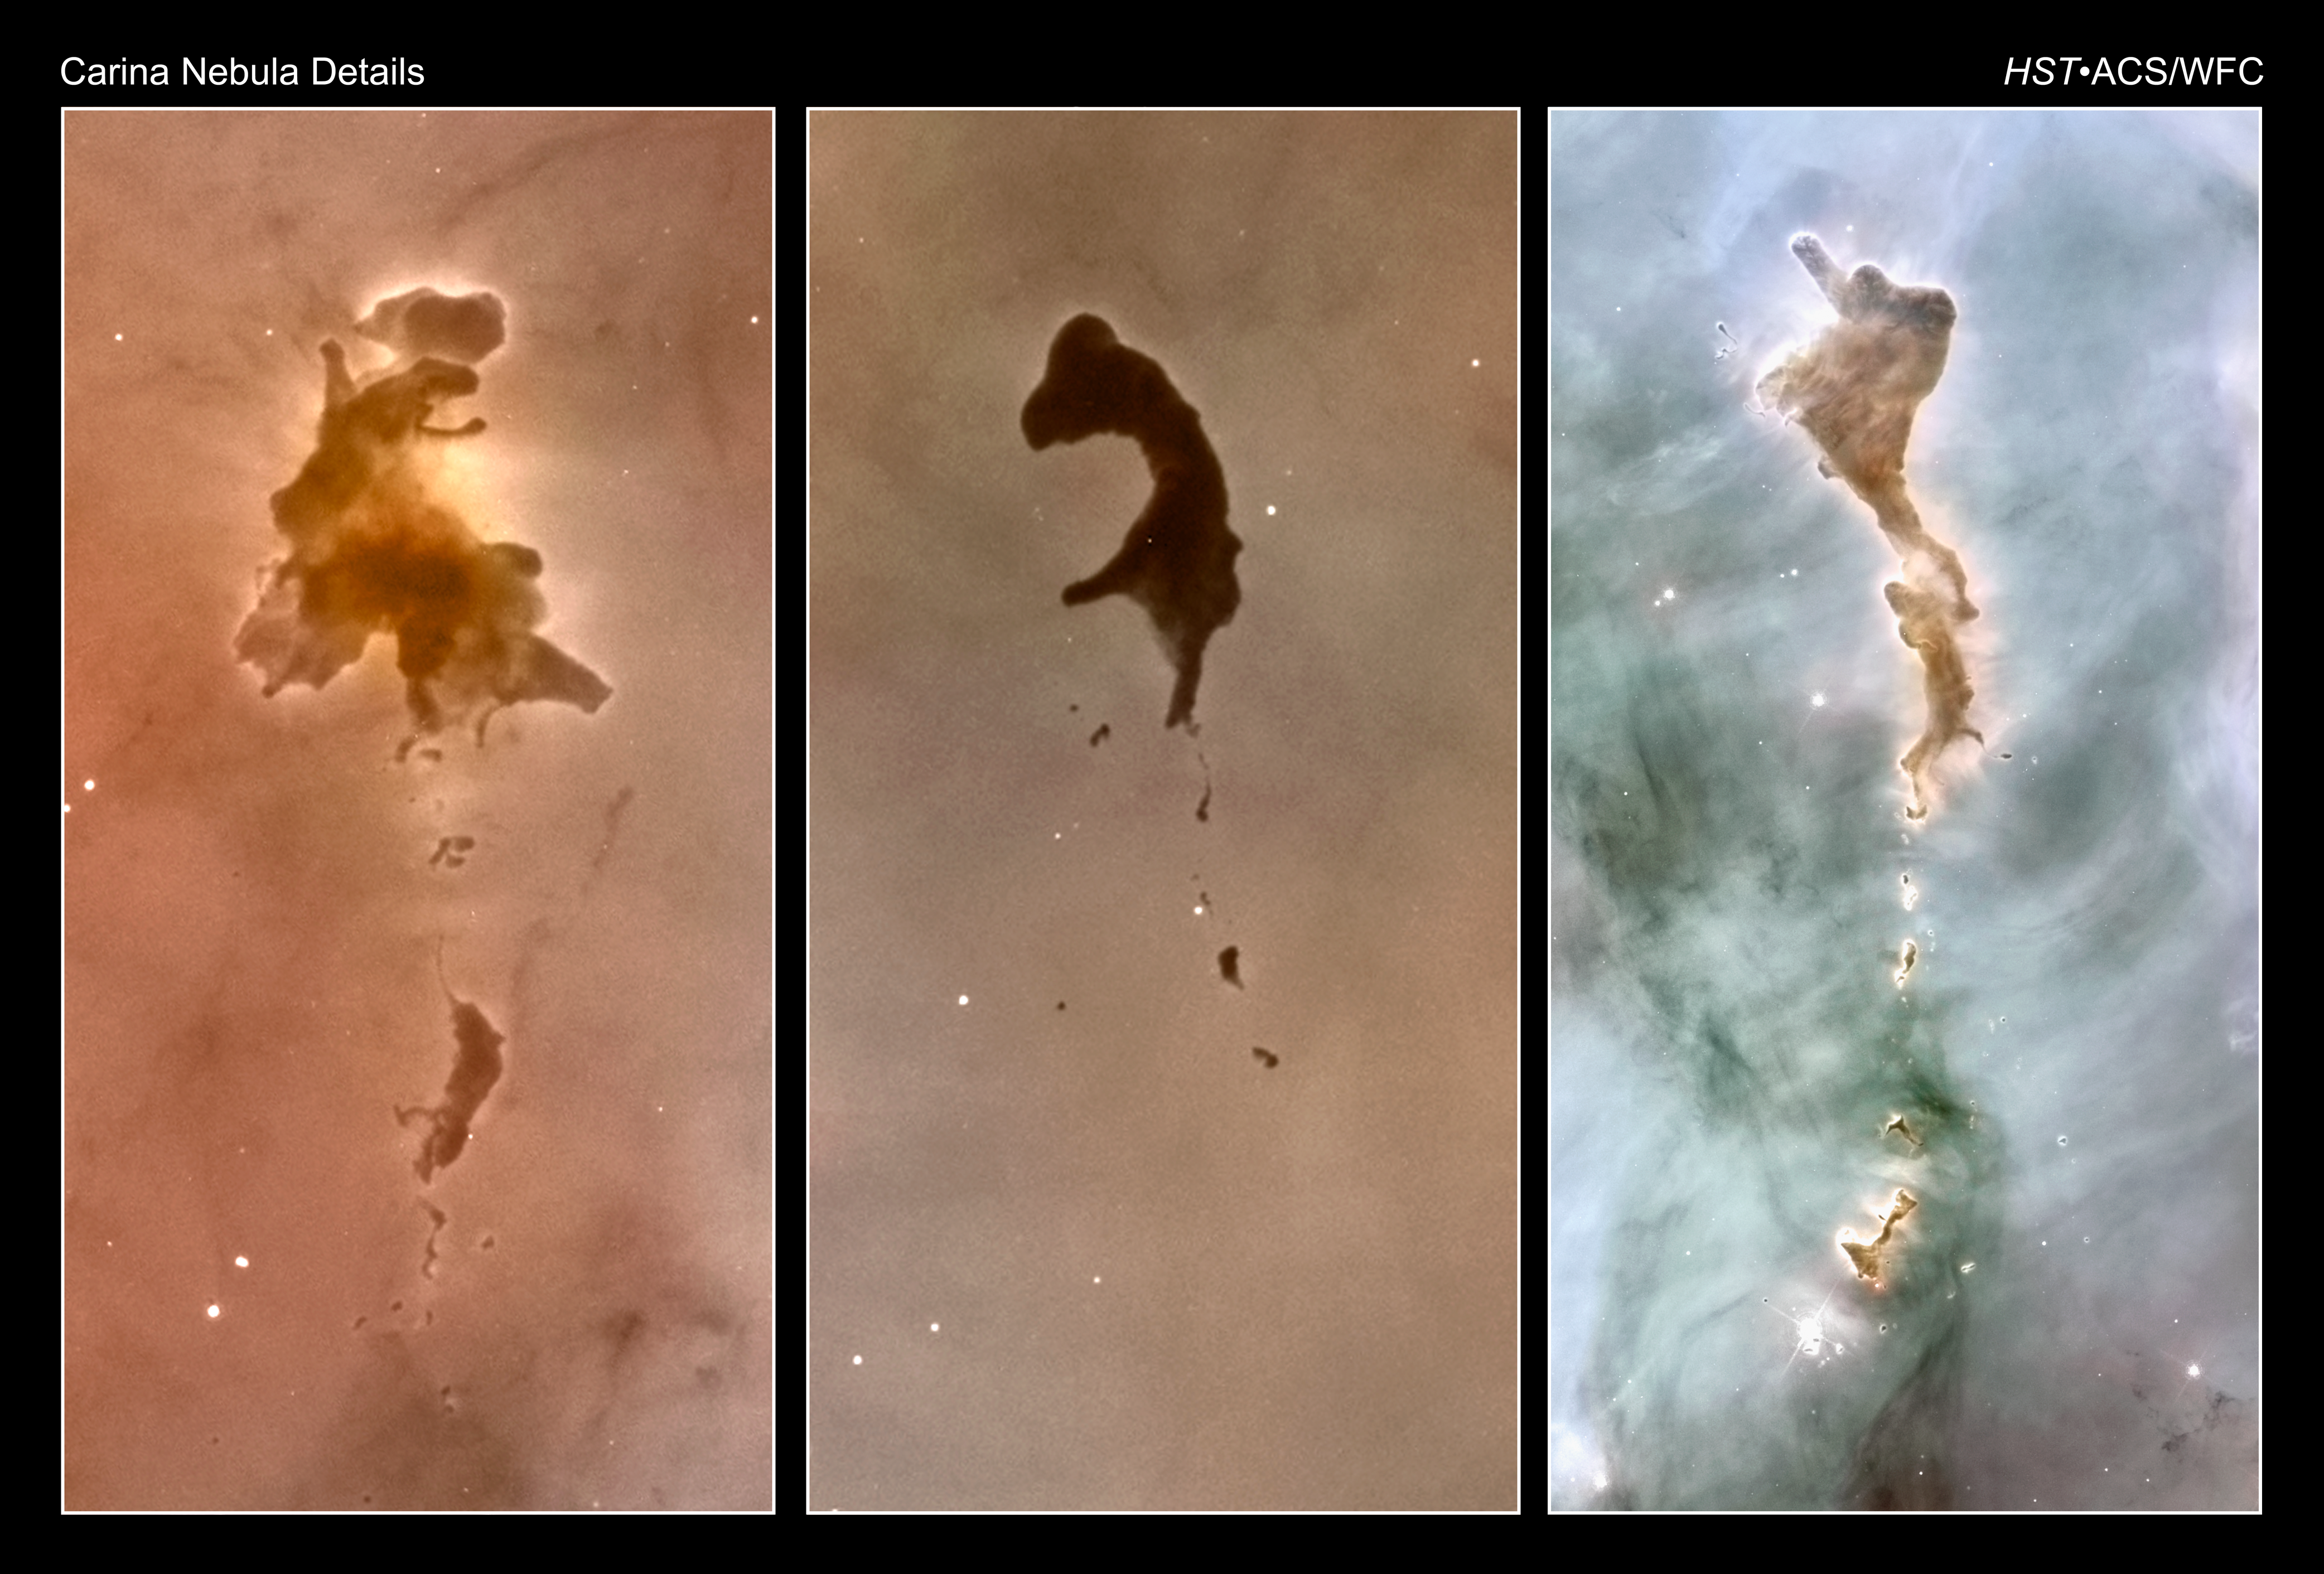

Carina Nebula Details

These three snapshots reveal nuggets of cold molecular hydrogen in the Carina Nebula.

This Hubble Space Telescope view of the central region of the Carina Nebula reveals a violent maelstrom of star birth. The fantasy-like landscape of the nebula is sculpted by the intense pressure of starlight from monster stars and their accompanying star clusters, as well as the hydrodynamics of their stellar winds of charged particles.The glowing edges of some of these objects indicates that they are being photoionized by the hottest stars in the cluster. It has been hypothesized that stars may form inside such dusty cocoons.

Credit: NASA, ESA, N. Smith (University of California, Berkeley), and The Hubble Heritage Team (STScI/AURA)